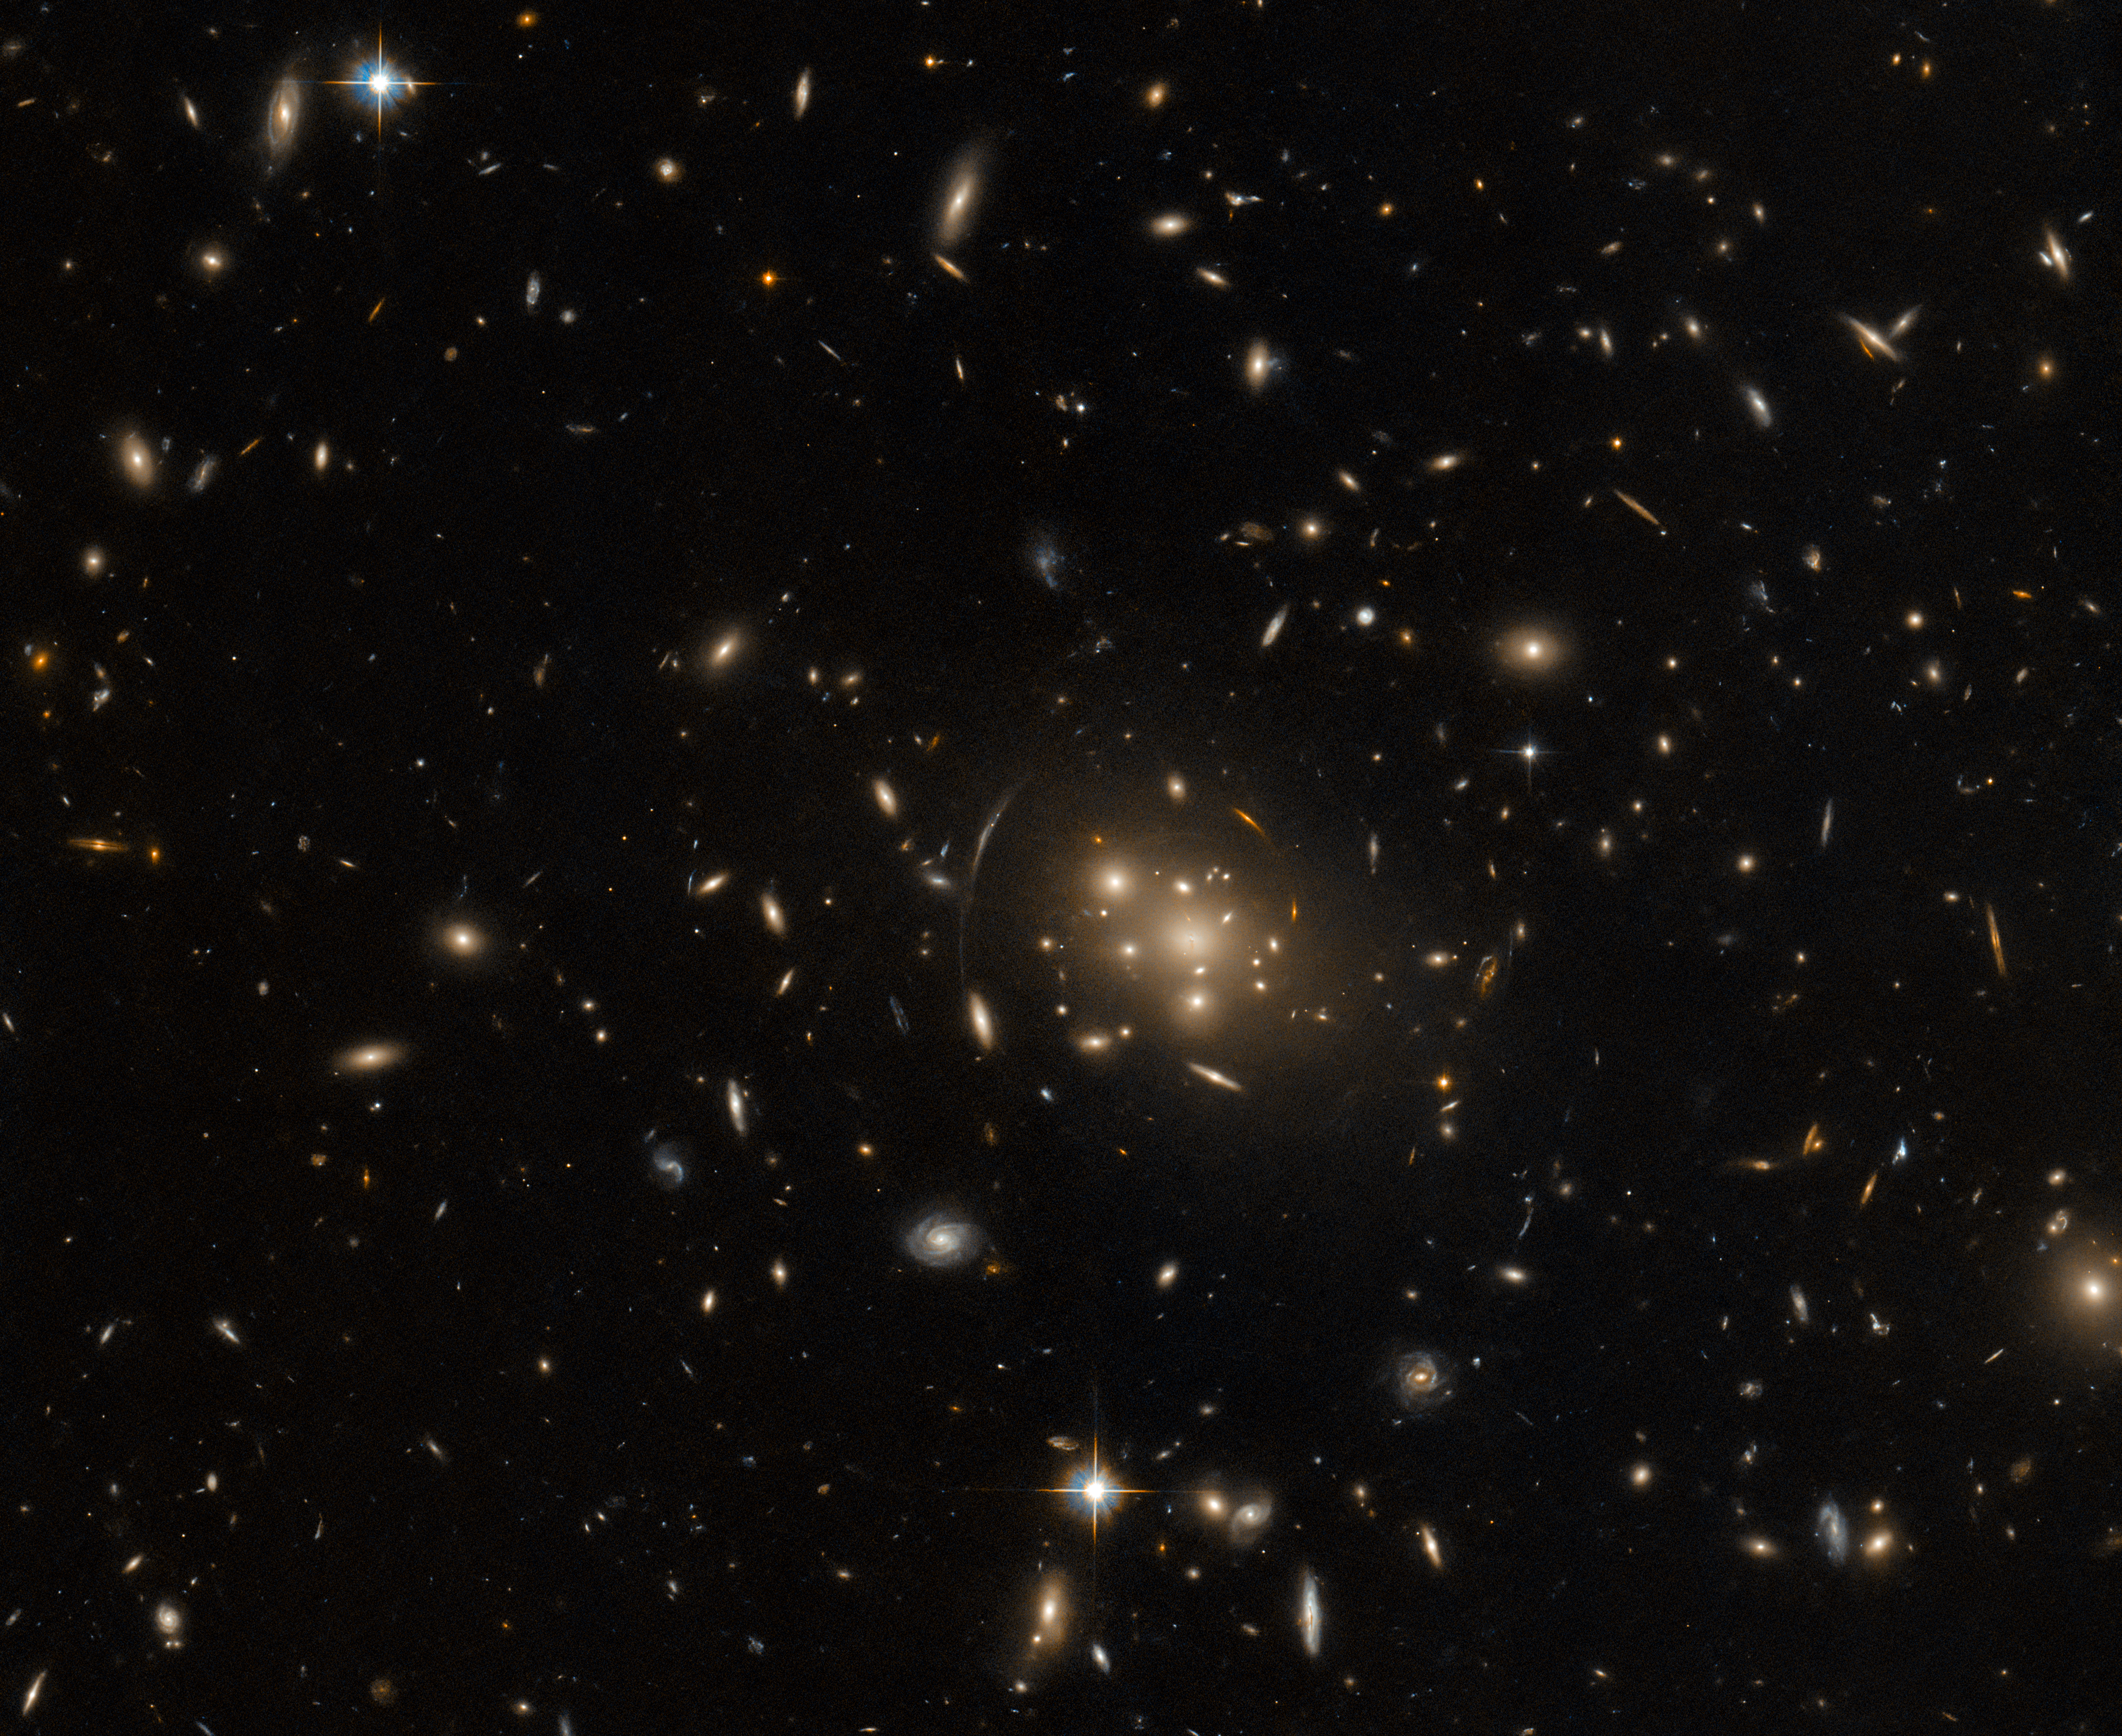

Cosmic Contortions

A massive galaxy cluster in the constellation Cetus dominates the centre of this image from the NASA/ESA Hubble Space Telescope. This image is populated with a serene collection of elliptical and spiral galaxies, but galaxies surrounding the central cluster — which is named SPT-CL J0019-2026 — appear stretched into bright arcs, as if distorted by a gargantuan magnifying glass. This cosmic contortion is called gravitational lensing, and it occurs when a massive object like a galaxy cluster has a sufficiently powerful gravitational field to distort and magnify the light from background objects. Gravitational lenses magnify light from objects that would usually be too distant and faint to observe, and so these lenses can extend Hubble’s view even deeper into the Universe.

This observation is part of an ongoing project to fill short gaps in Hubble’s observing schedule by systematically exploring the most massive galaxy clusters in the distant Universe, in the hopes of identifying promising targets for further study with both Hubble and the NASA/ESA/CSA James Webb Space Telescope. This particular galaxy cluster lies at a vast distance of 4.6 billion light years from Earth.

Each year, the Space Telescope Science Institute is inundated with observing proposals for Hubble, in which astronomers suggest targets for observation. Even after selecting only the very best proposals, scheduling observations of all of Hubble’s targets for a year is a formidable task. There is sometimes a small fraction of observing time left unused in Hubble’s schedule, so in its ‘spare time’ the telescope has a collection of objects to explore — including the lensing galaxy cluster shown in this image.

Credit: ESA/Hubble & NASA, H. Ebeling